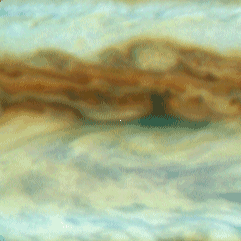

Galileo Probe Entry Site on Jupiter

This is one out of four enlarged Hubble images of Jupiter's equatorial region and it shows clouds sweeping across the predicted Galileo probe entry site, which is at the exact center of each frame (a small white dot has been inserted at the centered at the predicted entry site).

Credit: Reta Beebe (New Mexico State University), and NASA/ESA